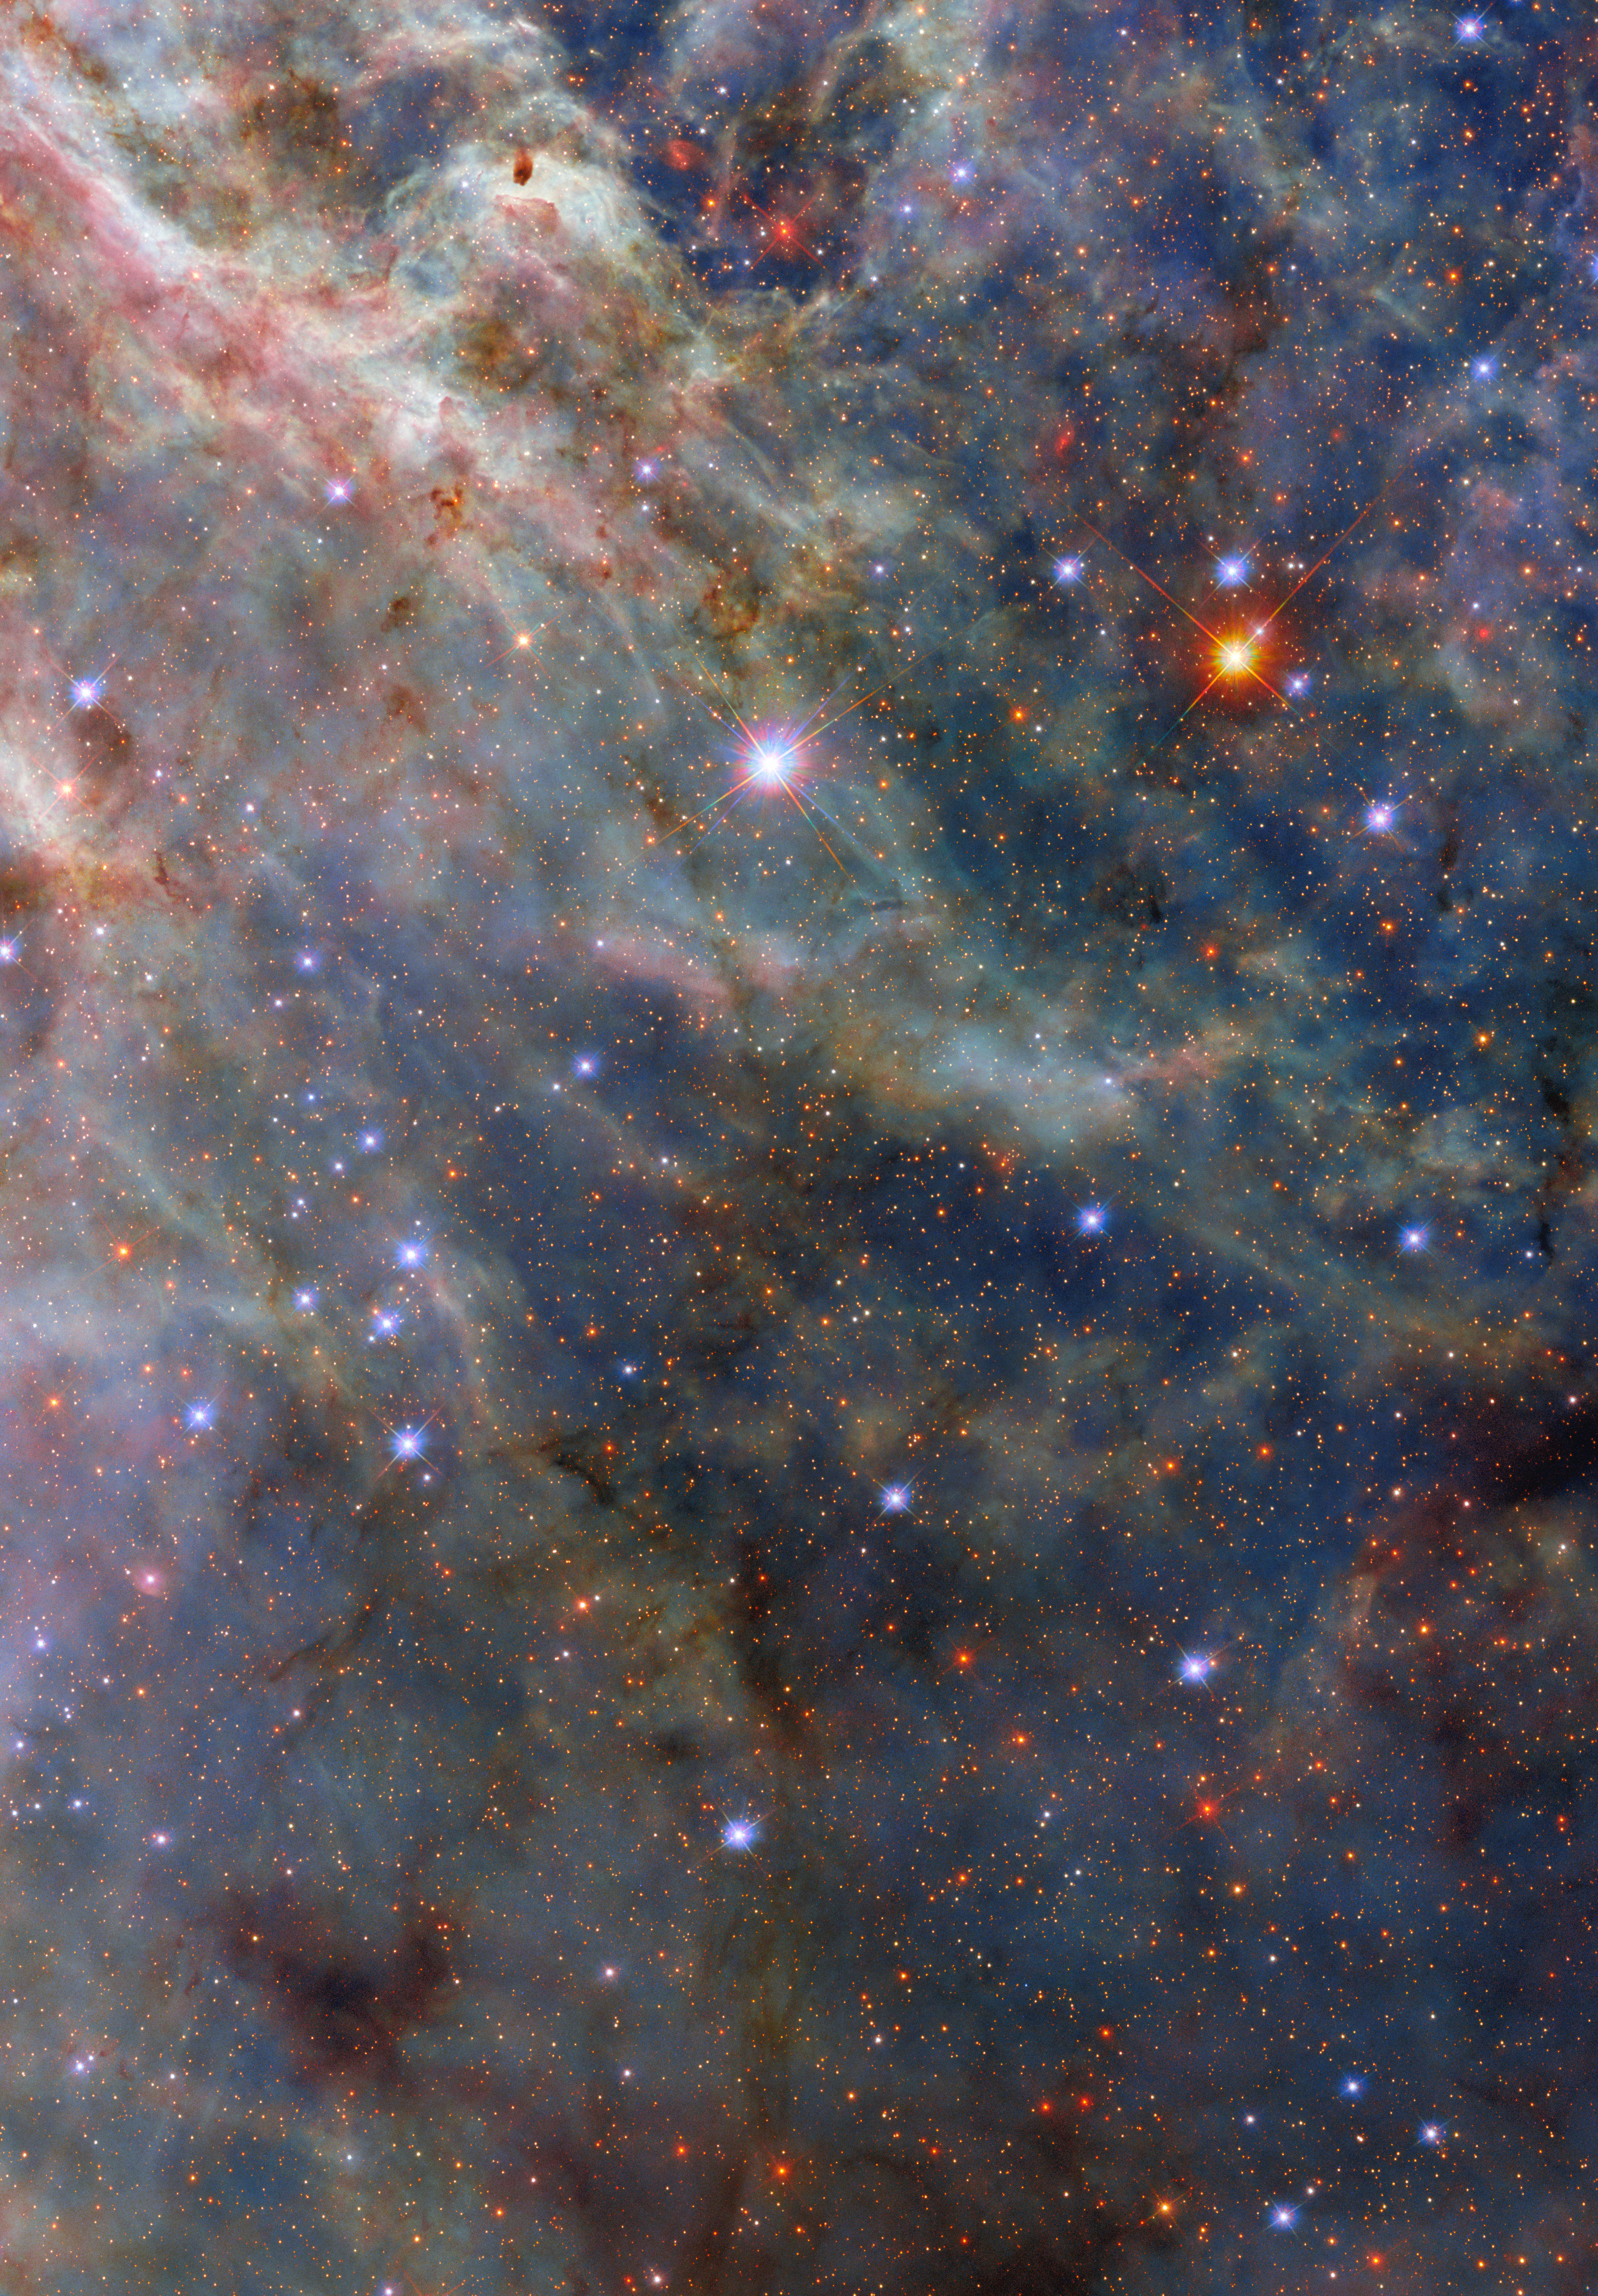

A sea monster and a Tarantula

A scene from a star-forming factory shines in this NASA/ESA Hubble Space Telescope Picture of the Week. This Hubble picture captures incredible details in the dusty clouds in a star-forming region called the Tarantula Nebula. What’s possibly the most amazing aspect of this detailed image is that this nebula isn’t even in our galaxy. Instead, it’s in the Large Magellanic Cloud, a dwarf galaxy that is located about 160 000 light-years away in the constellations Dorado and Mensa.

The Large Magellanic Cloud is the largest of the dozens of small satellite galaxies that orbit the Milky Way. The Tarantula Nebula is the largest and brightest star-forming region not just in the Large Magellanic Cloud, but in the entire group of nearby galaxies to which the Milky Way belongs.

The Tarantula Nebula is home to the most massive stars known, some of which are roughly 200 times as massive as our Sun. The scene pictured here is located away from the centre of the nebula, where there is a super star cluster called R136, but very close to a rare type of star called a Wolf–Rayet star. Wolf–Rayet stars are massive stars that have lost their outer shell of hydrogen and are extremely hot and luminous, powering dense and furious stellar winds.

This nebula is a frequent target for Hubble, whose multiwavelength capabilities are critical for capturing sculptural details in the nebula’s dusty clouds. The data used to create this image come from an observing programme called Scylla, named for a multi-headed sea monster from the Greek myth of Ulysses. The Scylla programme was designed to complement another Hubble observing programme called ULLYSSES (Ultraviolet Legacy Library of Young Stars as Essential Standards). ULLYSSES targets massive young stars in the Small and Large Magellanic Clouds, while Scylla investigates the structures of gas and dust that surround these stars.

Credit: ESA/Hubble & NASA, C. Murray